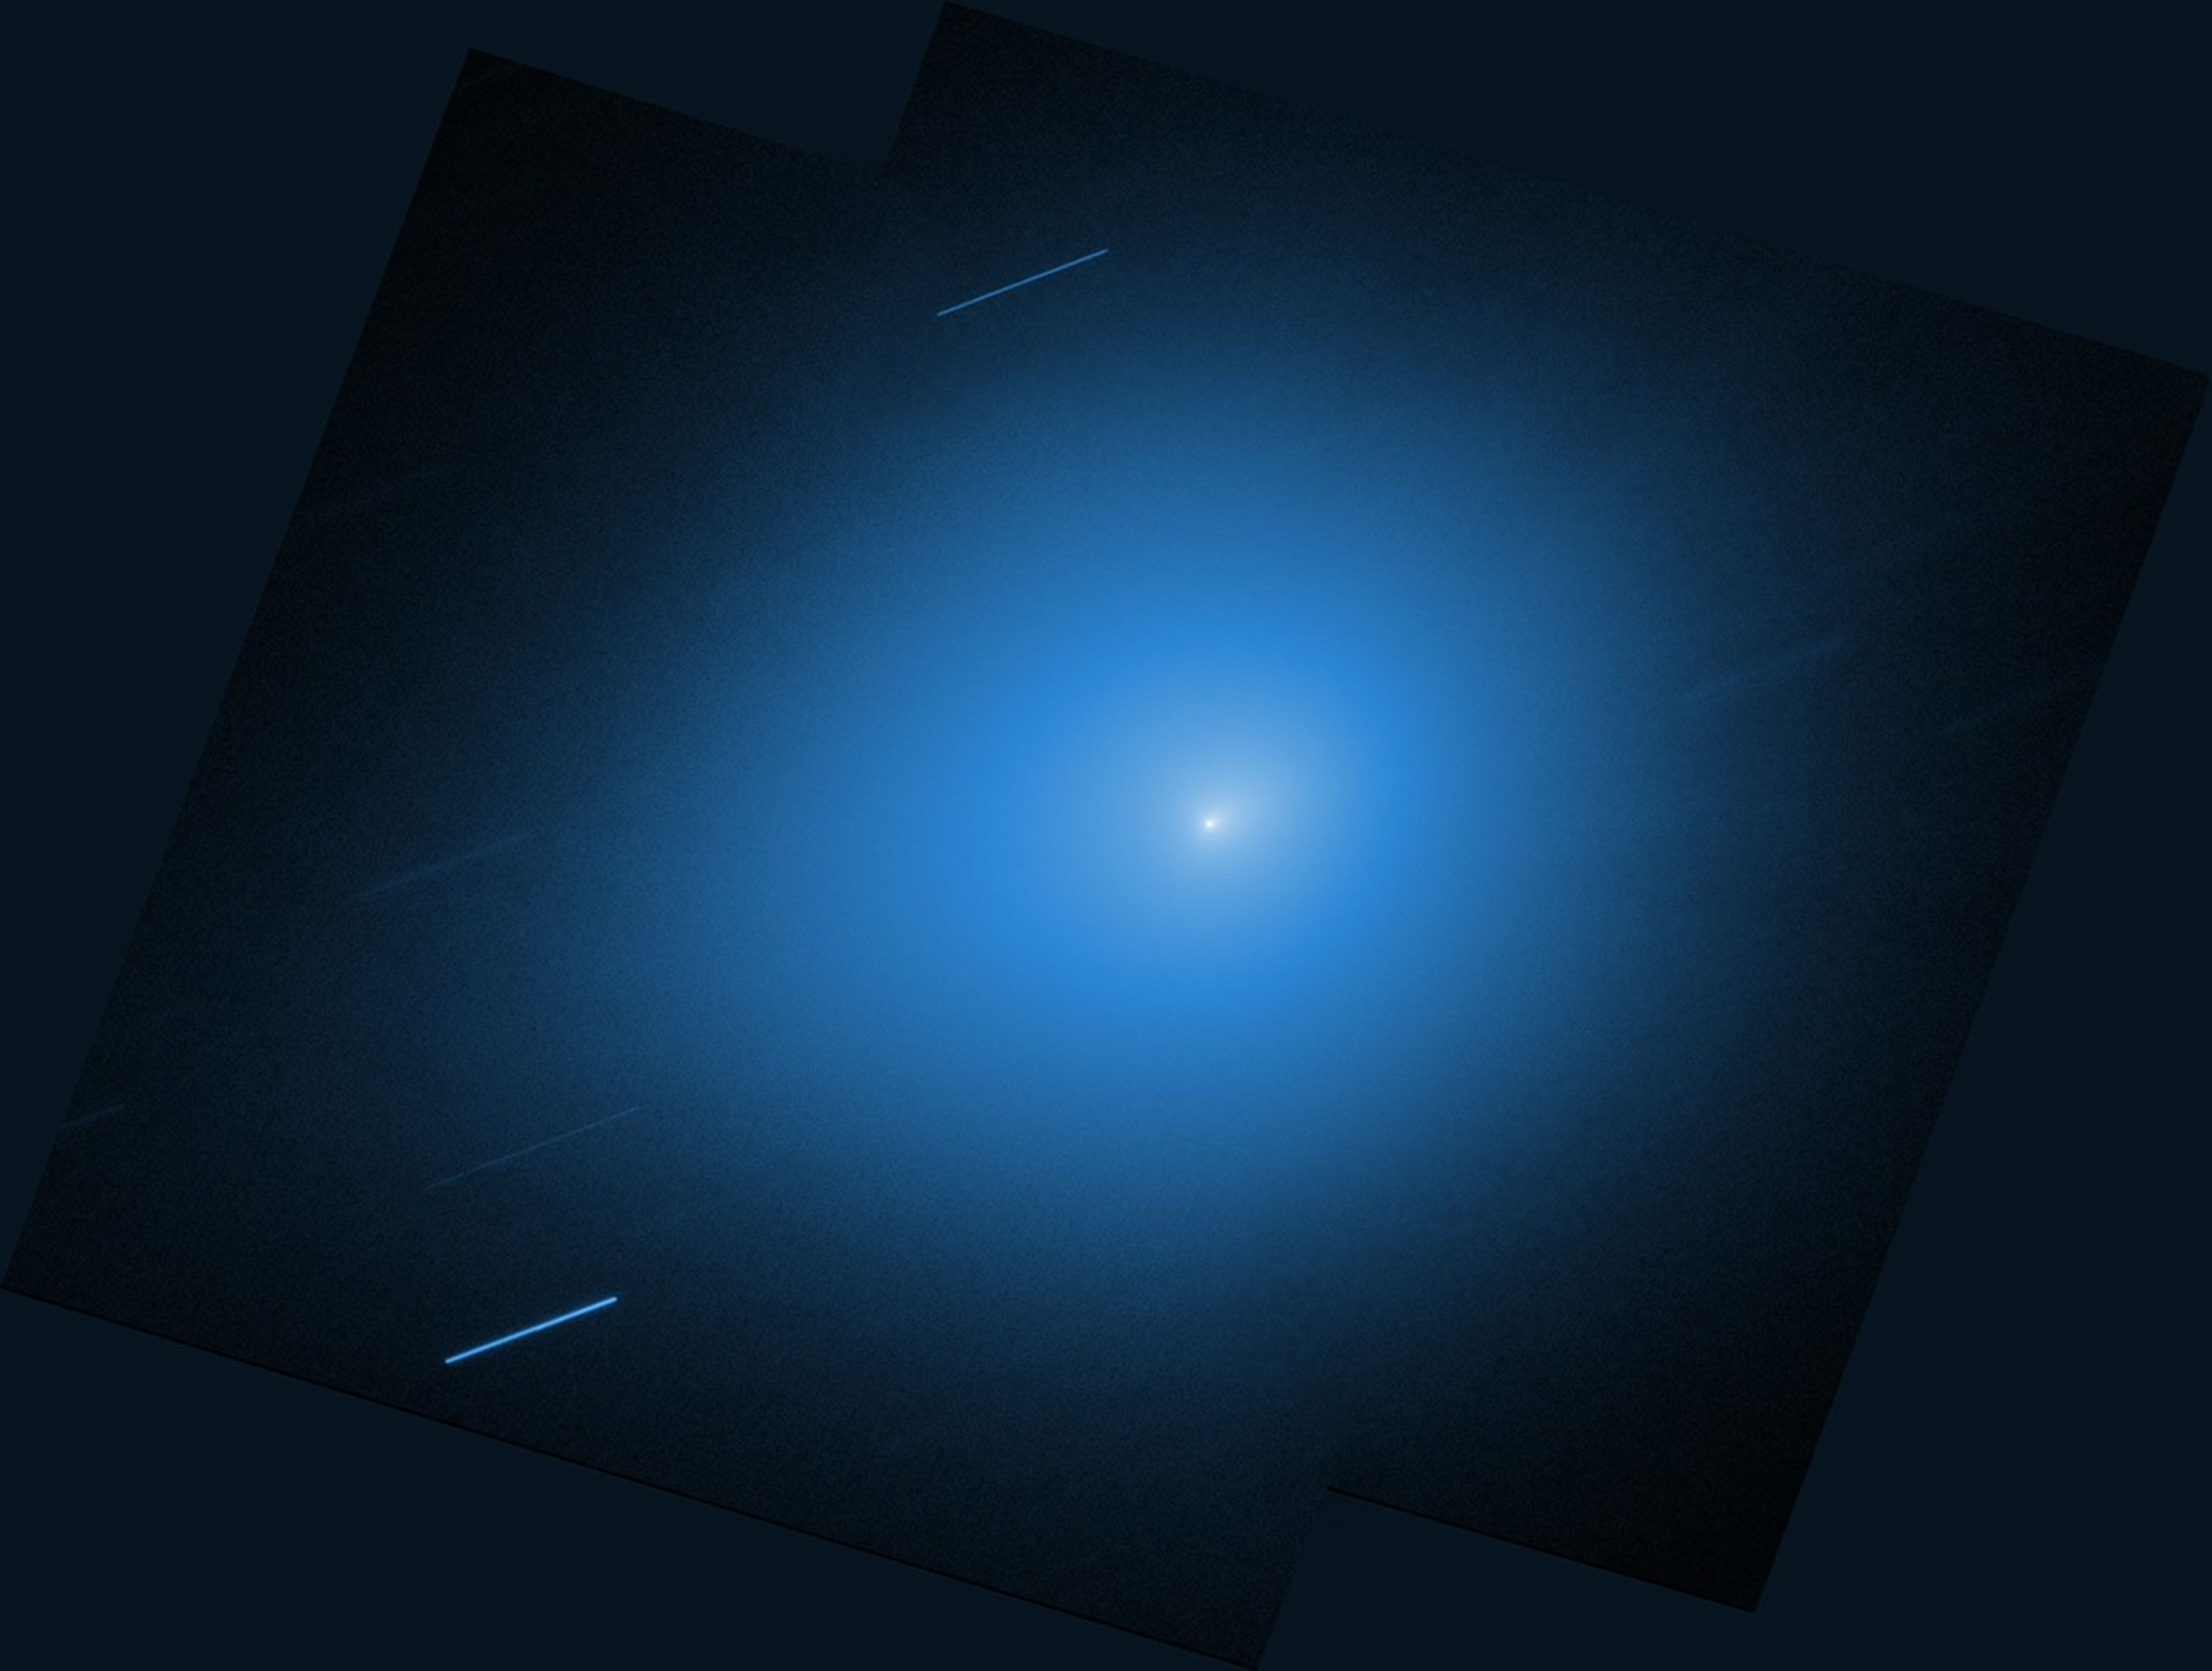

3I ATLAS (30 November 2025)

The NASA/ESA Hubble Space Telescope reobserved interstellar comet 3I/ATLAS on 30 November with its Wide Field Camera 3 instrument. At the time, the comet was about 286 million kilometers from Earth. Hubble tracked the comet as it moved across the sky. As a result, background stars appear as streaks of light.

Hubble previously observed 3I/ATLAS in July, shortly after its discovery, and a number of observatories have since studied the comet as well. Observations are expected to continue for several more months as 3I/ATLAS heads out of the solar system.

Credit: NASA, ESA, STScI, D. Jewitt (UCLA). Image Processing: J. DePasquale (STScI)